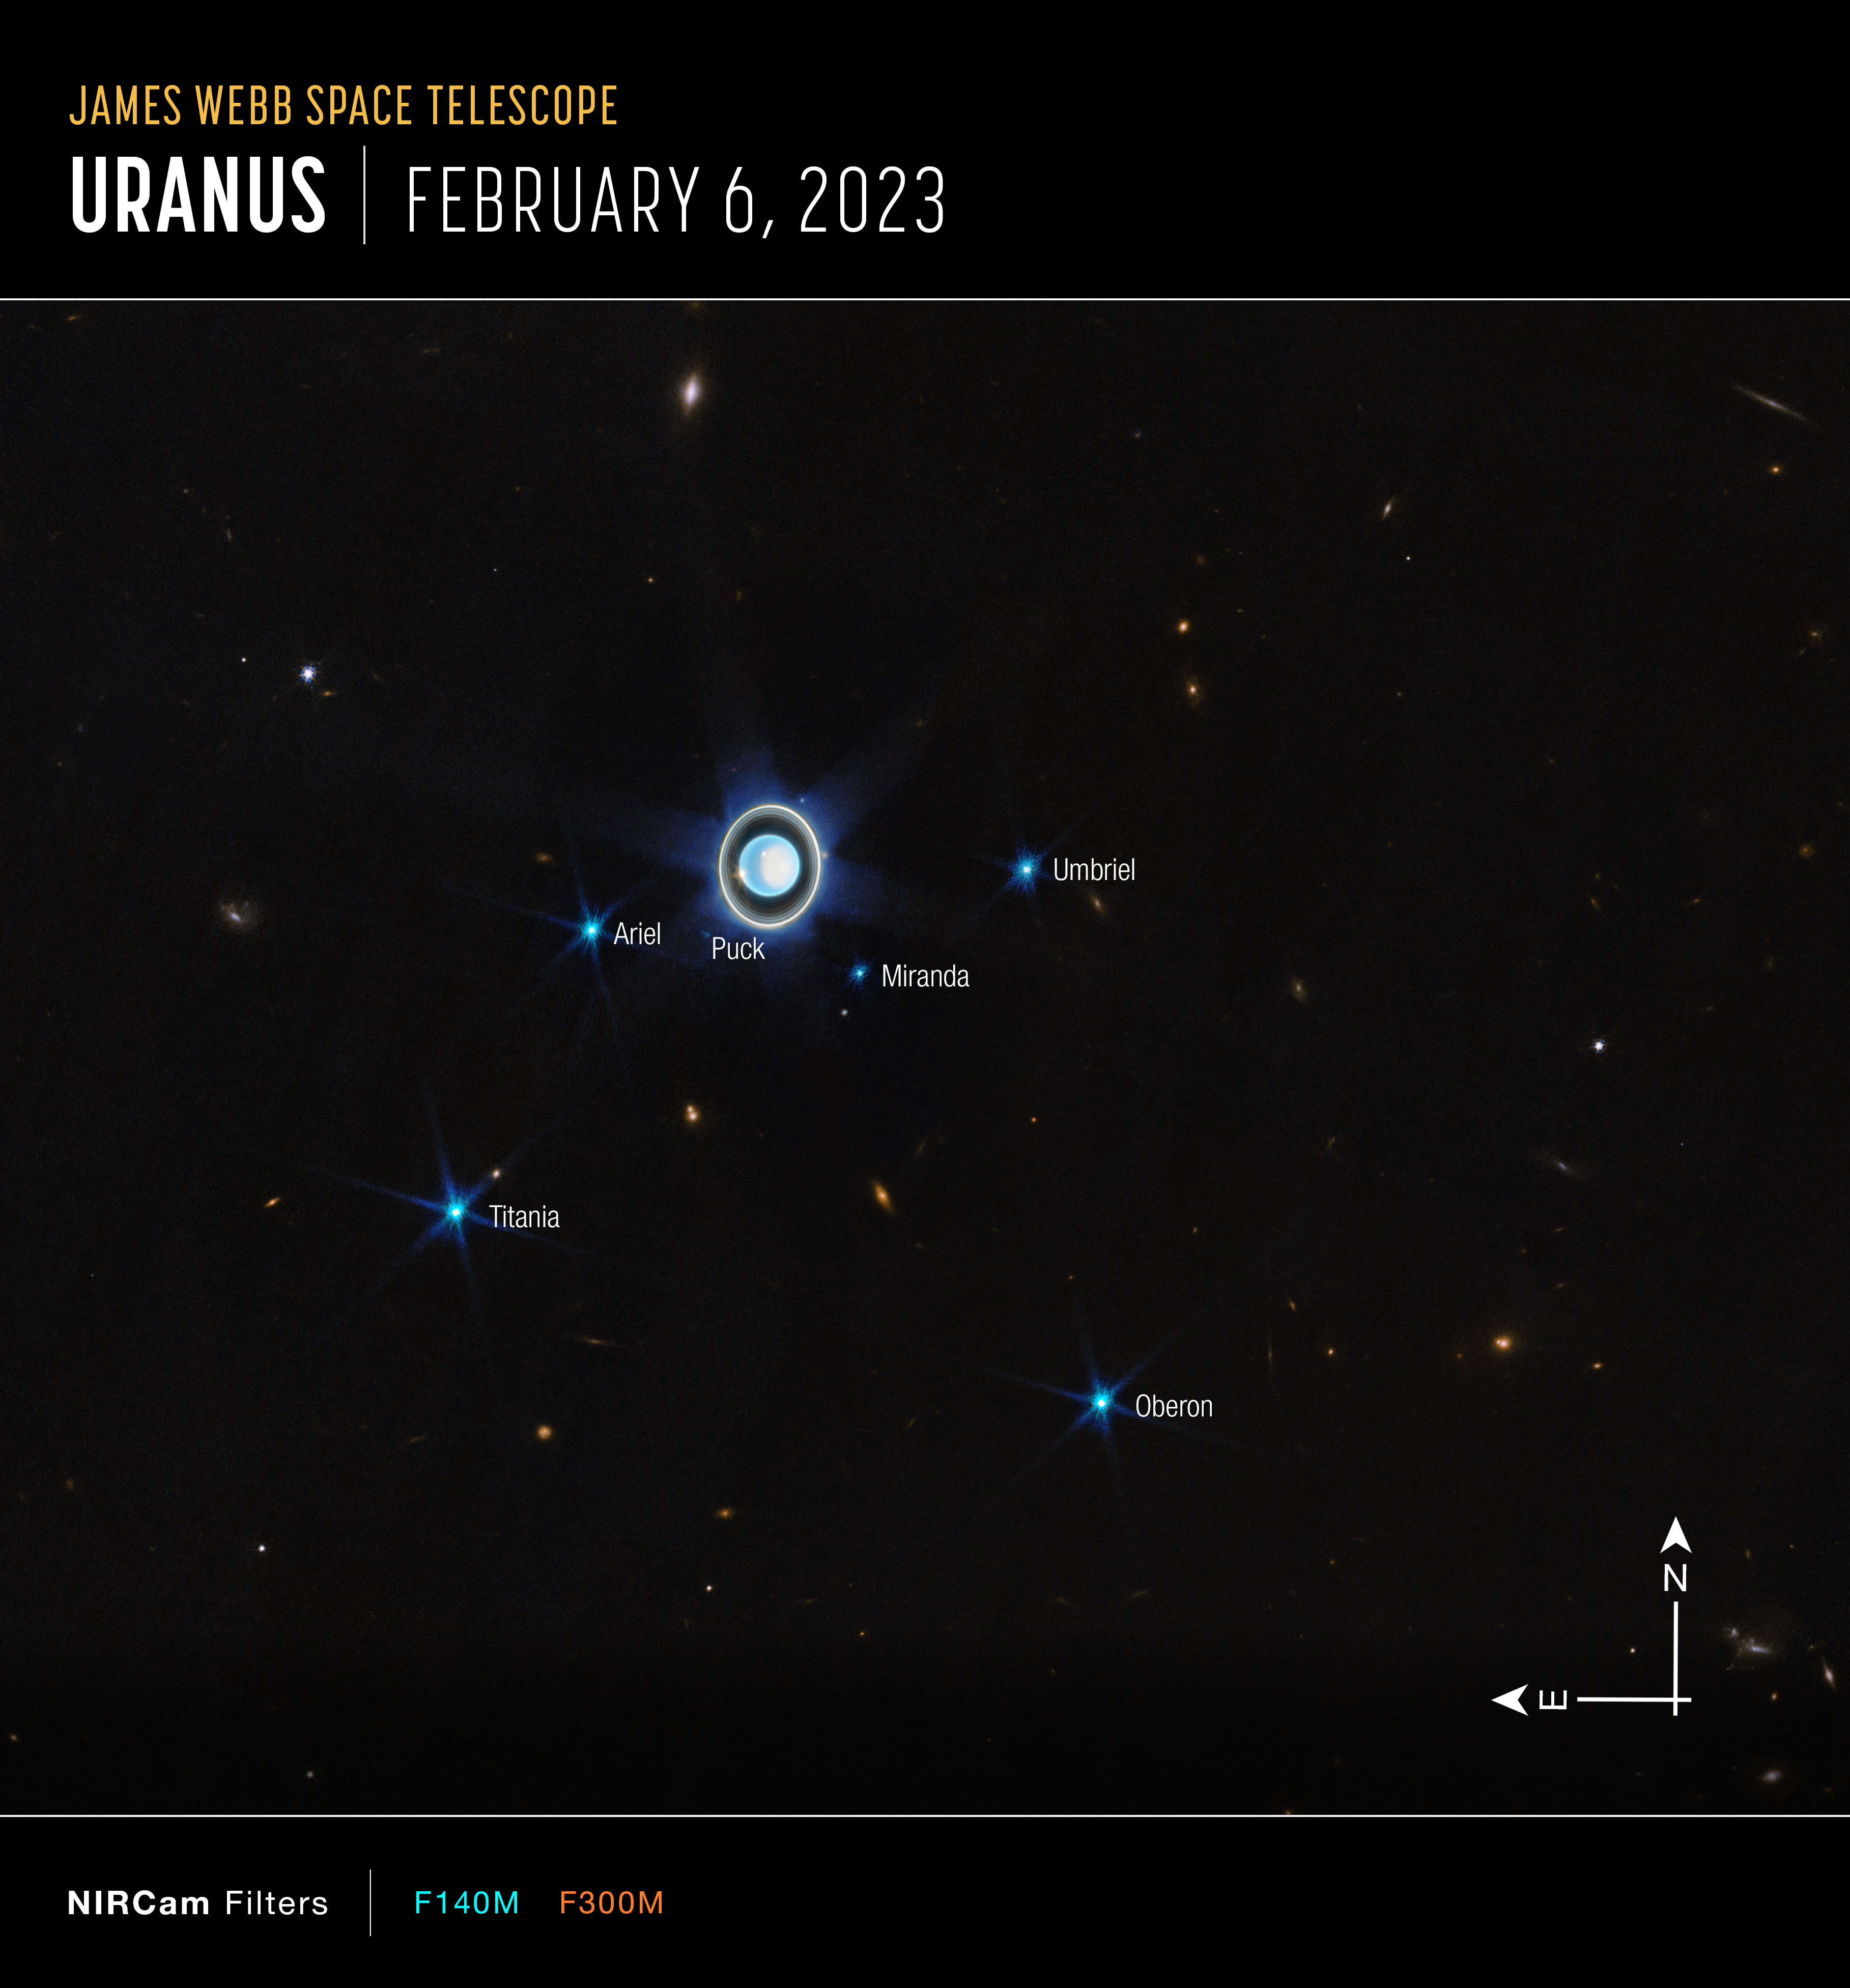

Wider view of the Uranian system (Annotated)

This wider view of the Uranian system with Webb’s NIRCam instrument features the planet Uranus as well as six of its 27 known moons (most of which are too small and faint to be seen in this short exposure). A handful of background objects, including many galaxies, are also seen.

Credit: NASA, ESA, CSA, STScI, J. DePasquale (STScI)